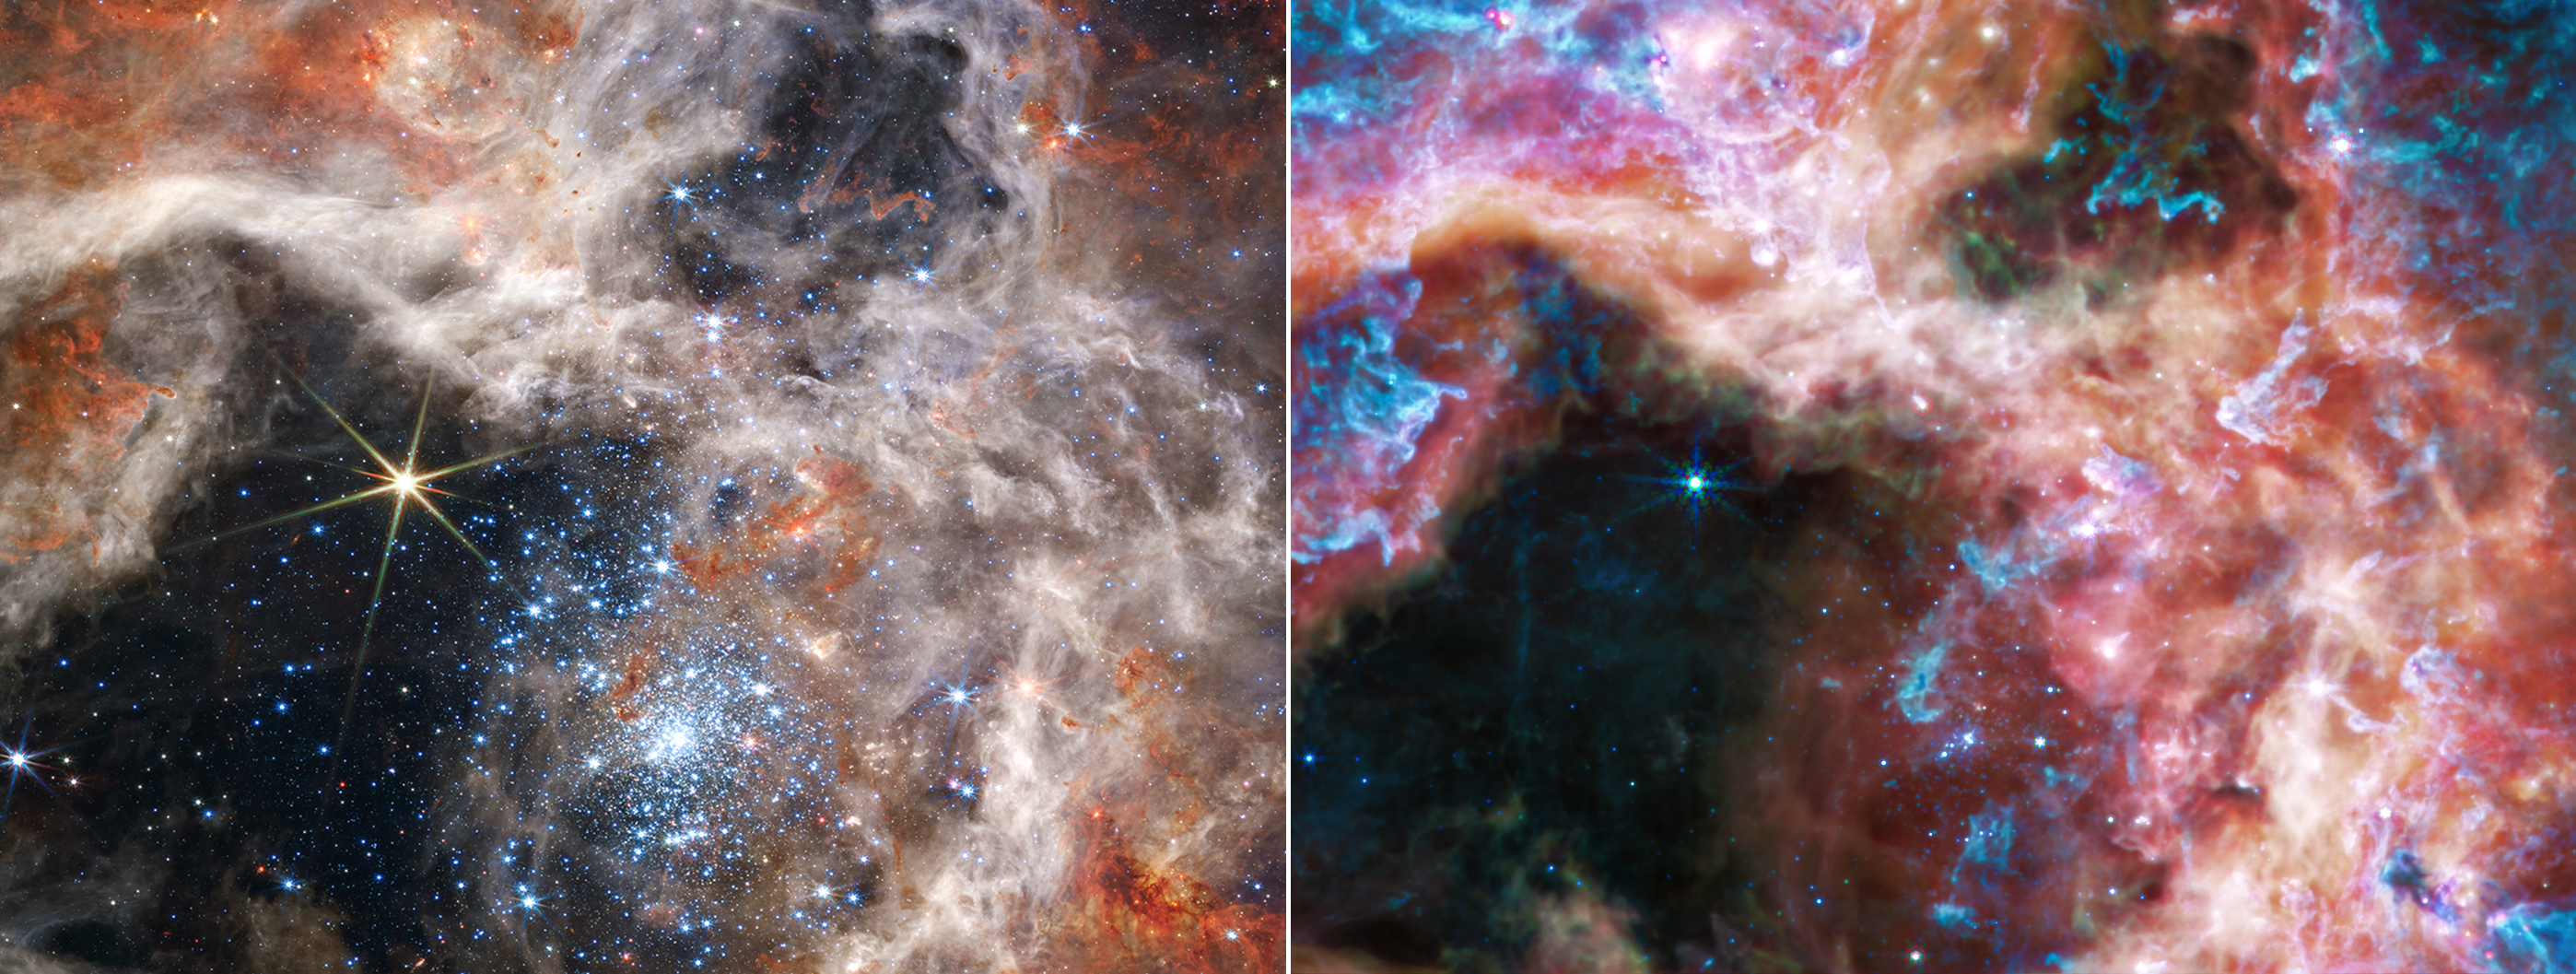

Two Views of the Tarantula Nebula (NIRCam and MIRI images)

A side-by-side display of the same region of the Tarantula Nebula brings out the distinctions between Webb’s near-infrared (closer to visible red, left) and mid-infrared (further from visible red, right) images. Each portion of the electromagnetic spectrum reveals and conceals different features, making data in different wavelengths valuable to astronomers for understanding the physics taking place.

The image captured by Webb’s Near-Infrared Camera (NIRCam, left) features bright, hot features, like the sparkling cluster of massive young stars, and the bright star to their upper left, featuring Webb’s distinctive diffraction spikes. Young, emerging stars shine blue, while scattered red points indicate stars that are still enshrouded in dust. Structure in the nebula, carved by the stellar winds of the massive young stars, is intricately detailed.

In the view from Webb’s Mid-Infrared Instrument (MIRI), the hot young stars fade, and cooler gas takes the spotlight. Much of the nebula takes on a ghostly appearance in the mid-infrared, because these longer wavelengths of light are able to penetrate the dust clouds and reach Webb. Previously hidden bubbles and dust-embedded stars emerge. A particularly prominent, spherically shaped bubble – being blown out by a newborn star – appears in the MIRI image just to the right of the now-darkened central star cluster.

Another difference between the two images is the appearance of the bright, lone star at the top of the nebula’s cavity. In the MIRI image (right) the star is fainter relative to the surrounding nebula, so the glare and the distortion of Webb’s diffraction spikes are much less prominent.

In the midst of the central cluster of young stars, one dense gas clump is clearly visible in both images – it is one of the last, dense remnants of the nebula that the young cluster stars’ stellar winds have not yet eroded away.

NIRCam was built by a team at the University of Arizona and Lockheed Martin’s Advanced Technology Center.

MIRI was contributed by ESA and NASA, with the instrument designed and built by a consortium of nationally funded European Institutes (The MIRI European Consortium) in partnership with JPL and the University of Arizona.

Credit: NASA, ESA, CSA, and STScI